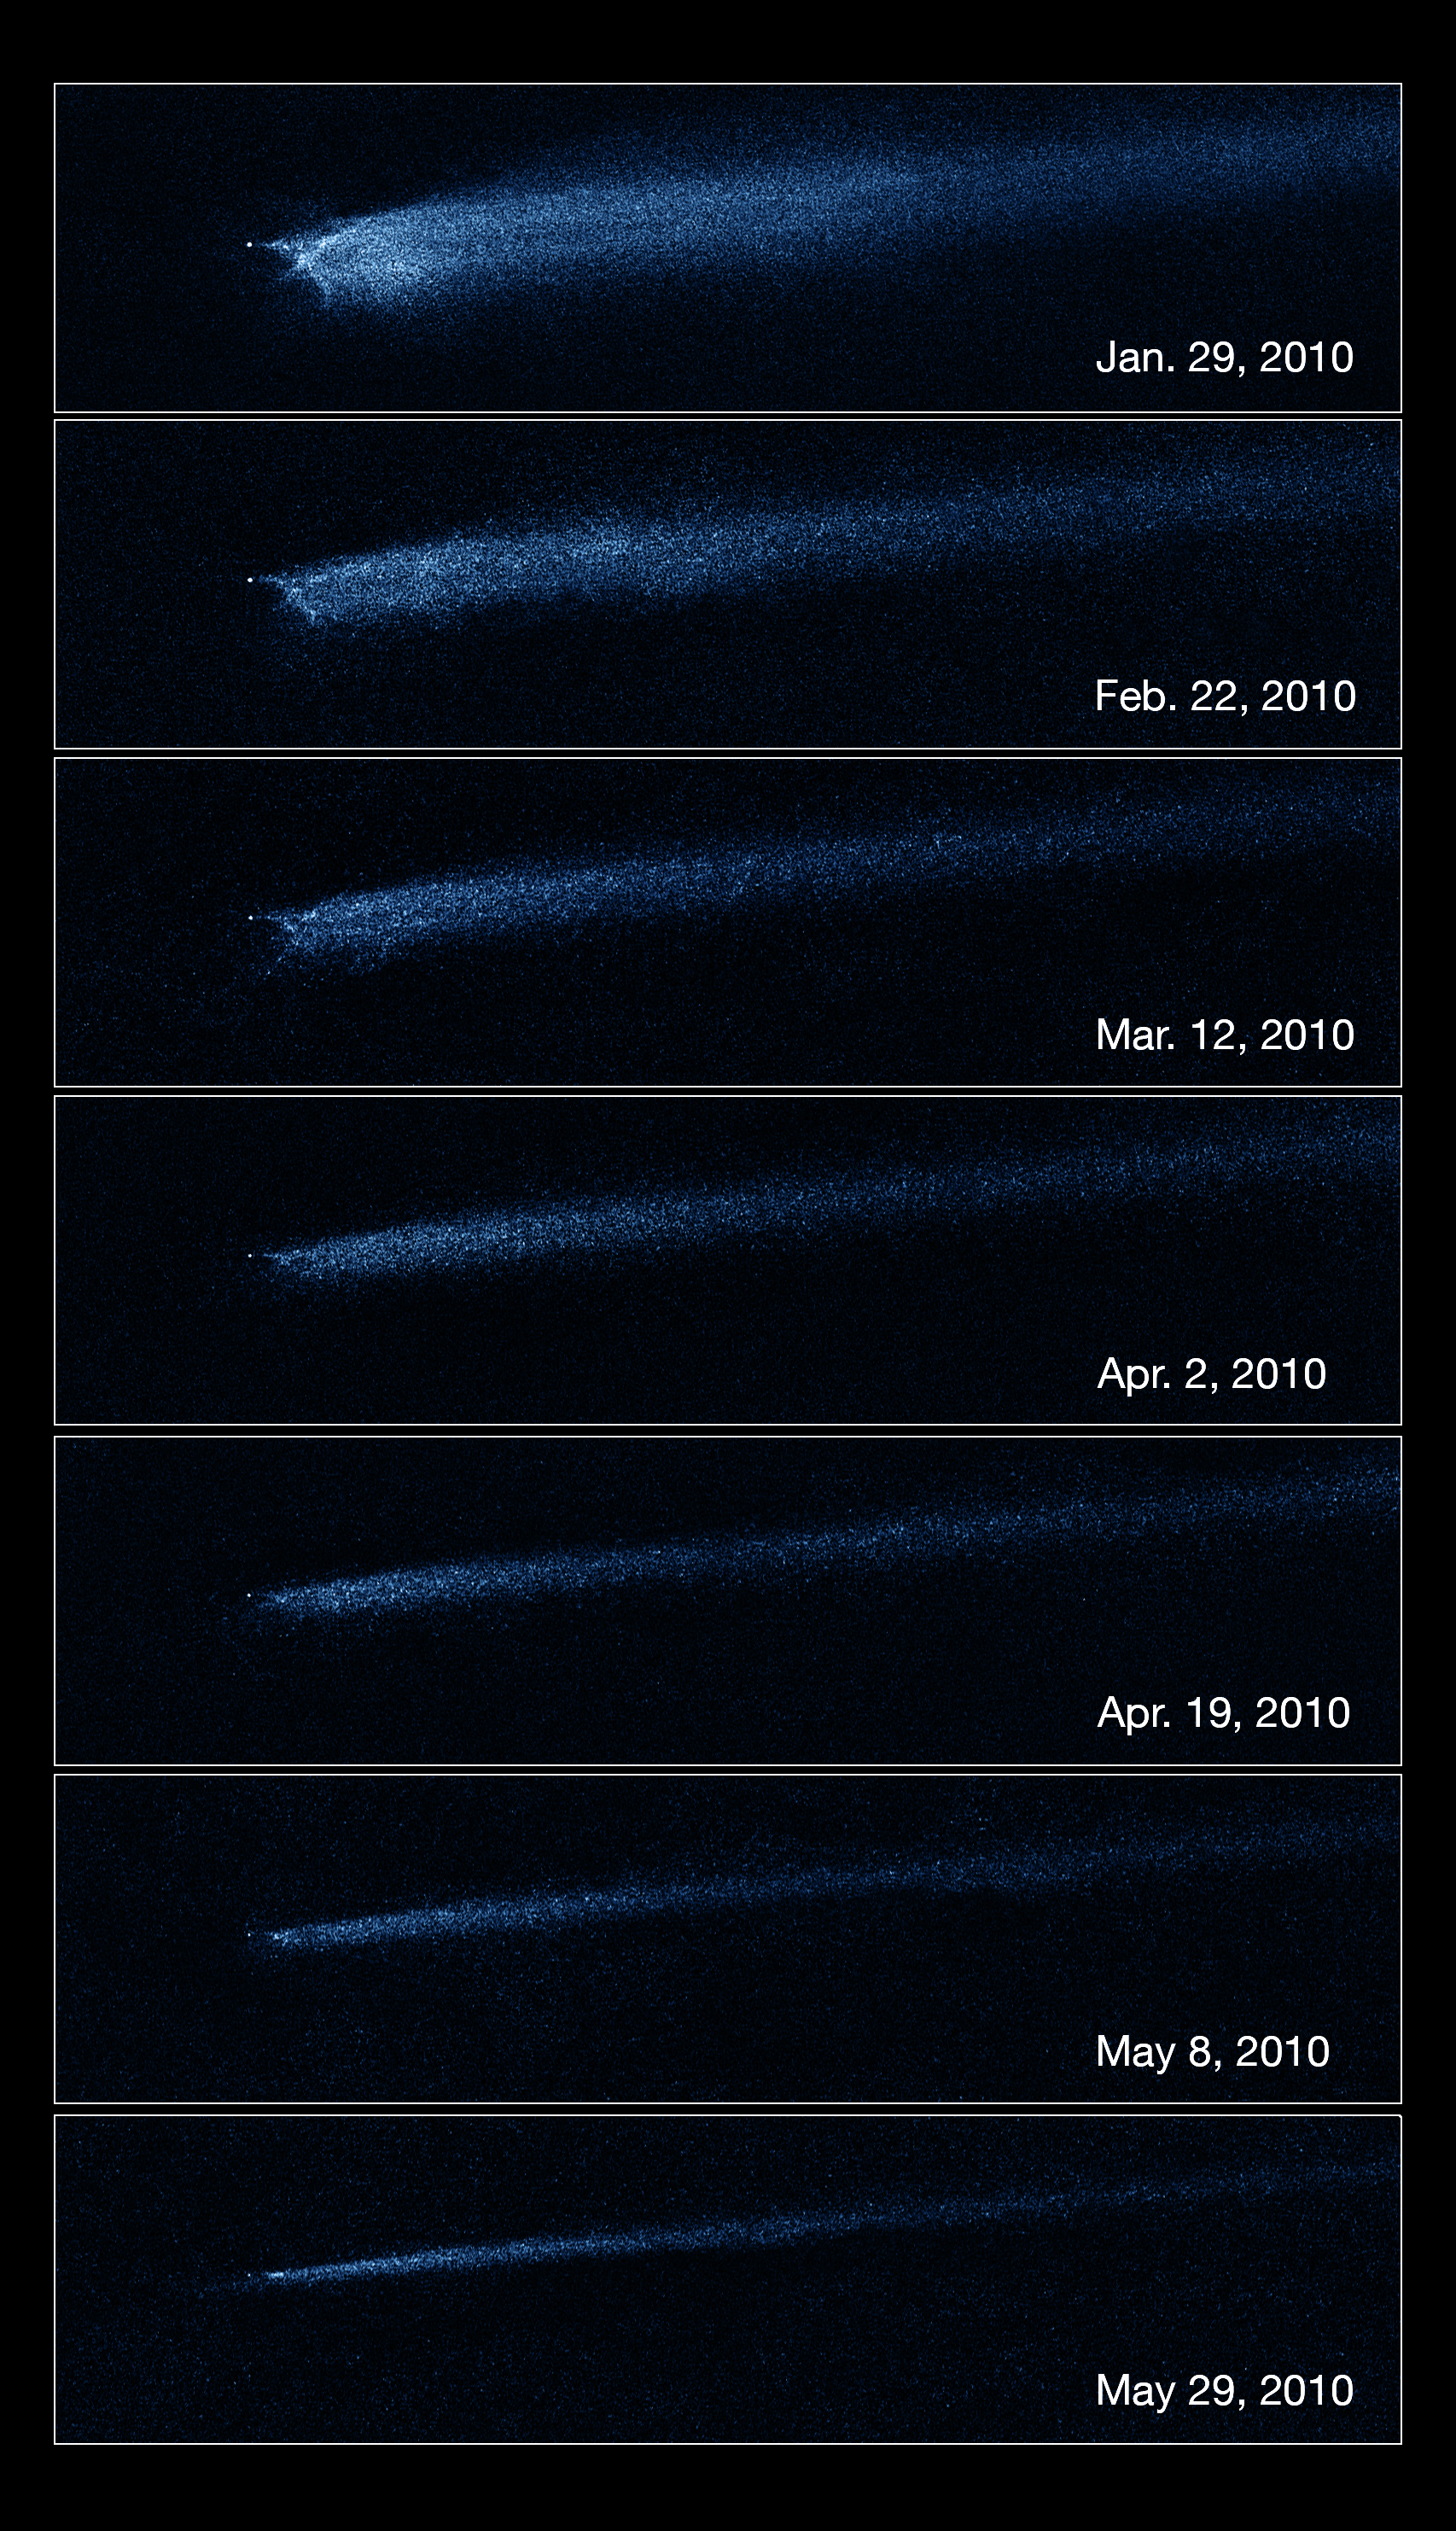

Hubble captures aftermath of asteroid collision

This series of images taken by Hubble’s Wide Field Camera 3 clearly shows the slow evolution of the debris coming from asteroid P/2010 A2, which is thought to be due to a collision with a smaller asteroid.

When astronomers first spotted the unusual X shape, they assumed that they were observing the immediate aftermath of an impact. However, the slower than anticipated rate of change in the appearance of the debris suggests that the collision in fact took place about a year earlier than the first observations.

These seven exposures were taken between January and May 2010 while the asteroid was rapidly receding from Earth. As the asteroid gets further away from us, we are able to see more of its comet-like tail in each subsequent frame. In the top picture, the portion of the tail we see is around 50 000 kilometres long. In the bottom picture, we see around 85 000 kilometres.

For all images, the field of view remains about 75 arcseconds across. The images were taken in visible light (filter F606W) and artificially coloured blue.

Credit: NASA, ESA and D. Jewitt (UCLA)